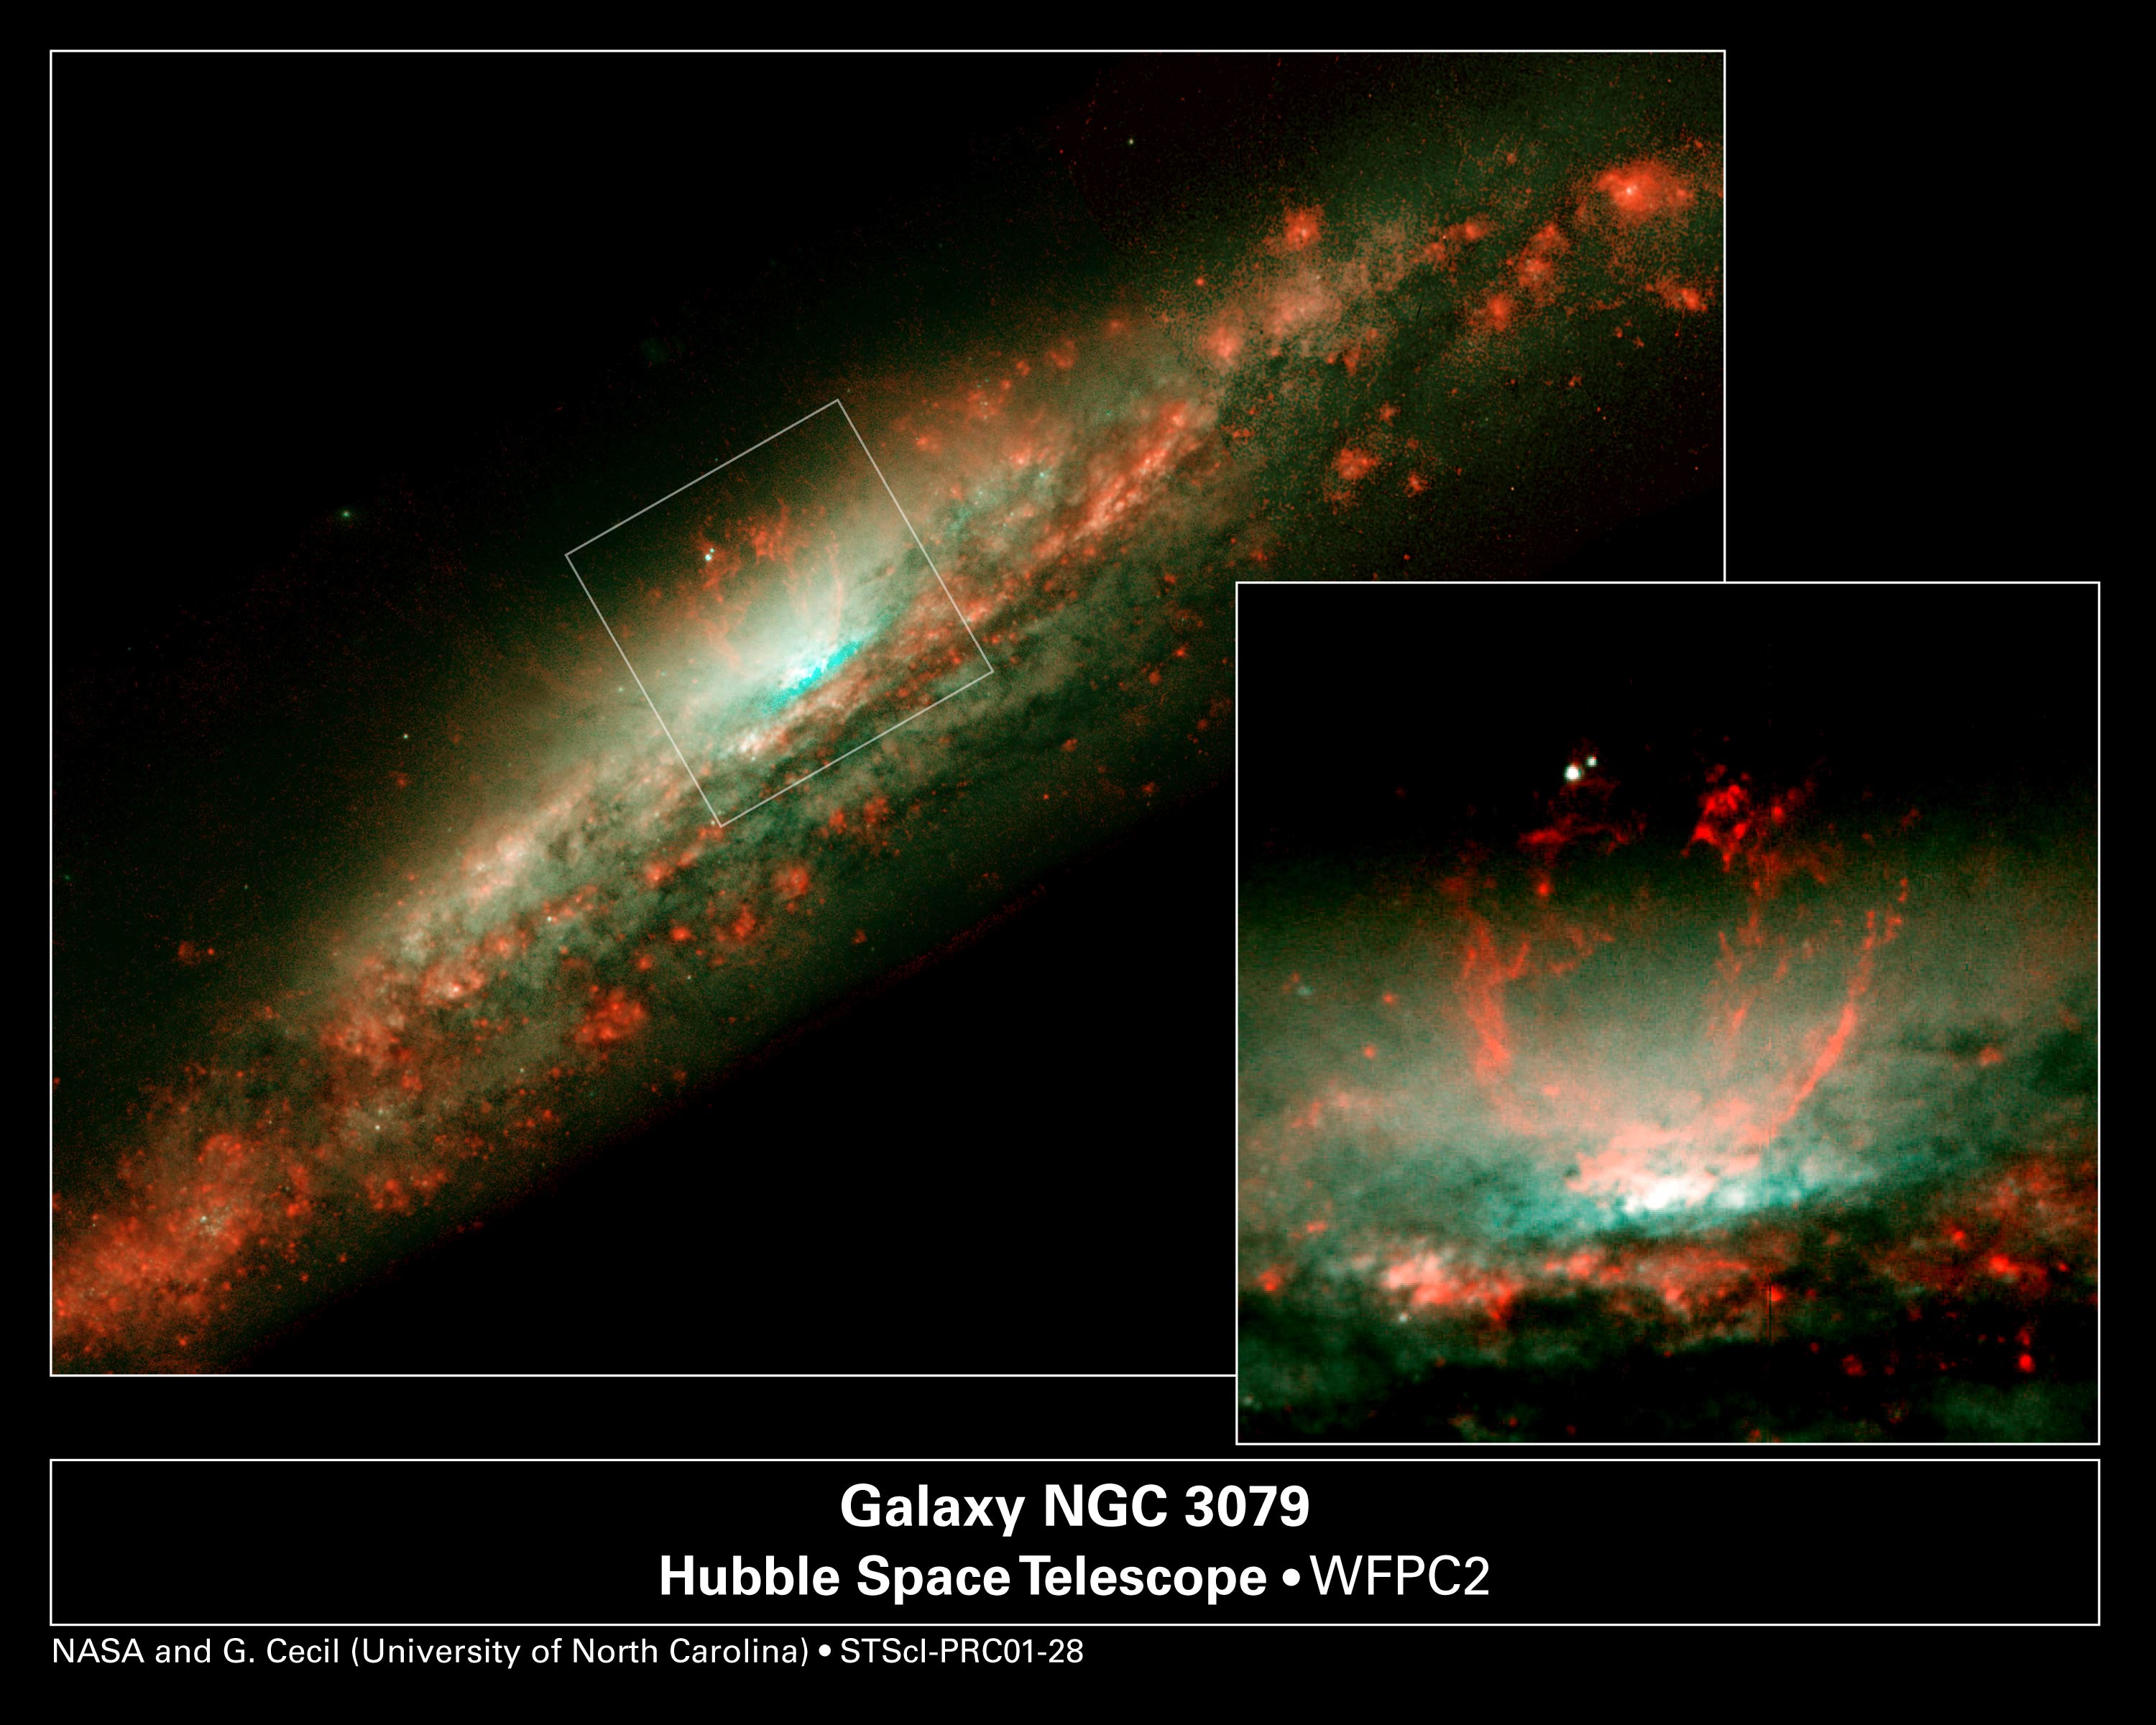

Baby Burp in Galaxy's Core (Overview)

These NASA/ESA Hubble Space Telescope snapshots reveal dramatic activities within the core of the galaxy NGC 3079, where a lumpy bubble of hot gas is rising from a cauldron of glowing matter. The picture at left shows the bubble in the center of the galaxy's disk. The structure is more than 3, 000 light-years wide and rises 3, 500 light-years above the galaxy's disk. The smaller photo at right is a close-up view of the bubble. Astronomers suspect that the bubble is being blown by 'winds' (high-speed streams of particles) released during a burst of star formation. Gaseous filaments at the top of the bubble are whirling around in a vortex and are being expelled into space. Eventually, this gas will rain down upon the galaxy's disk where it may collide with gas clouds, compress them, and form a new generation of stars. The two white dots just above the bubble are probably stars in the galaxy.

Credit: NASA/ESA, Gerald Cecil (University of North Carolina), Sylvain Veilleux (University of Maryland), Joss Bland-Hawthorn (Anglo-Australian Observatory), and Alex Filippenko (University of California at Berkeley).